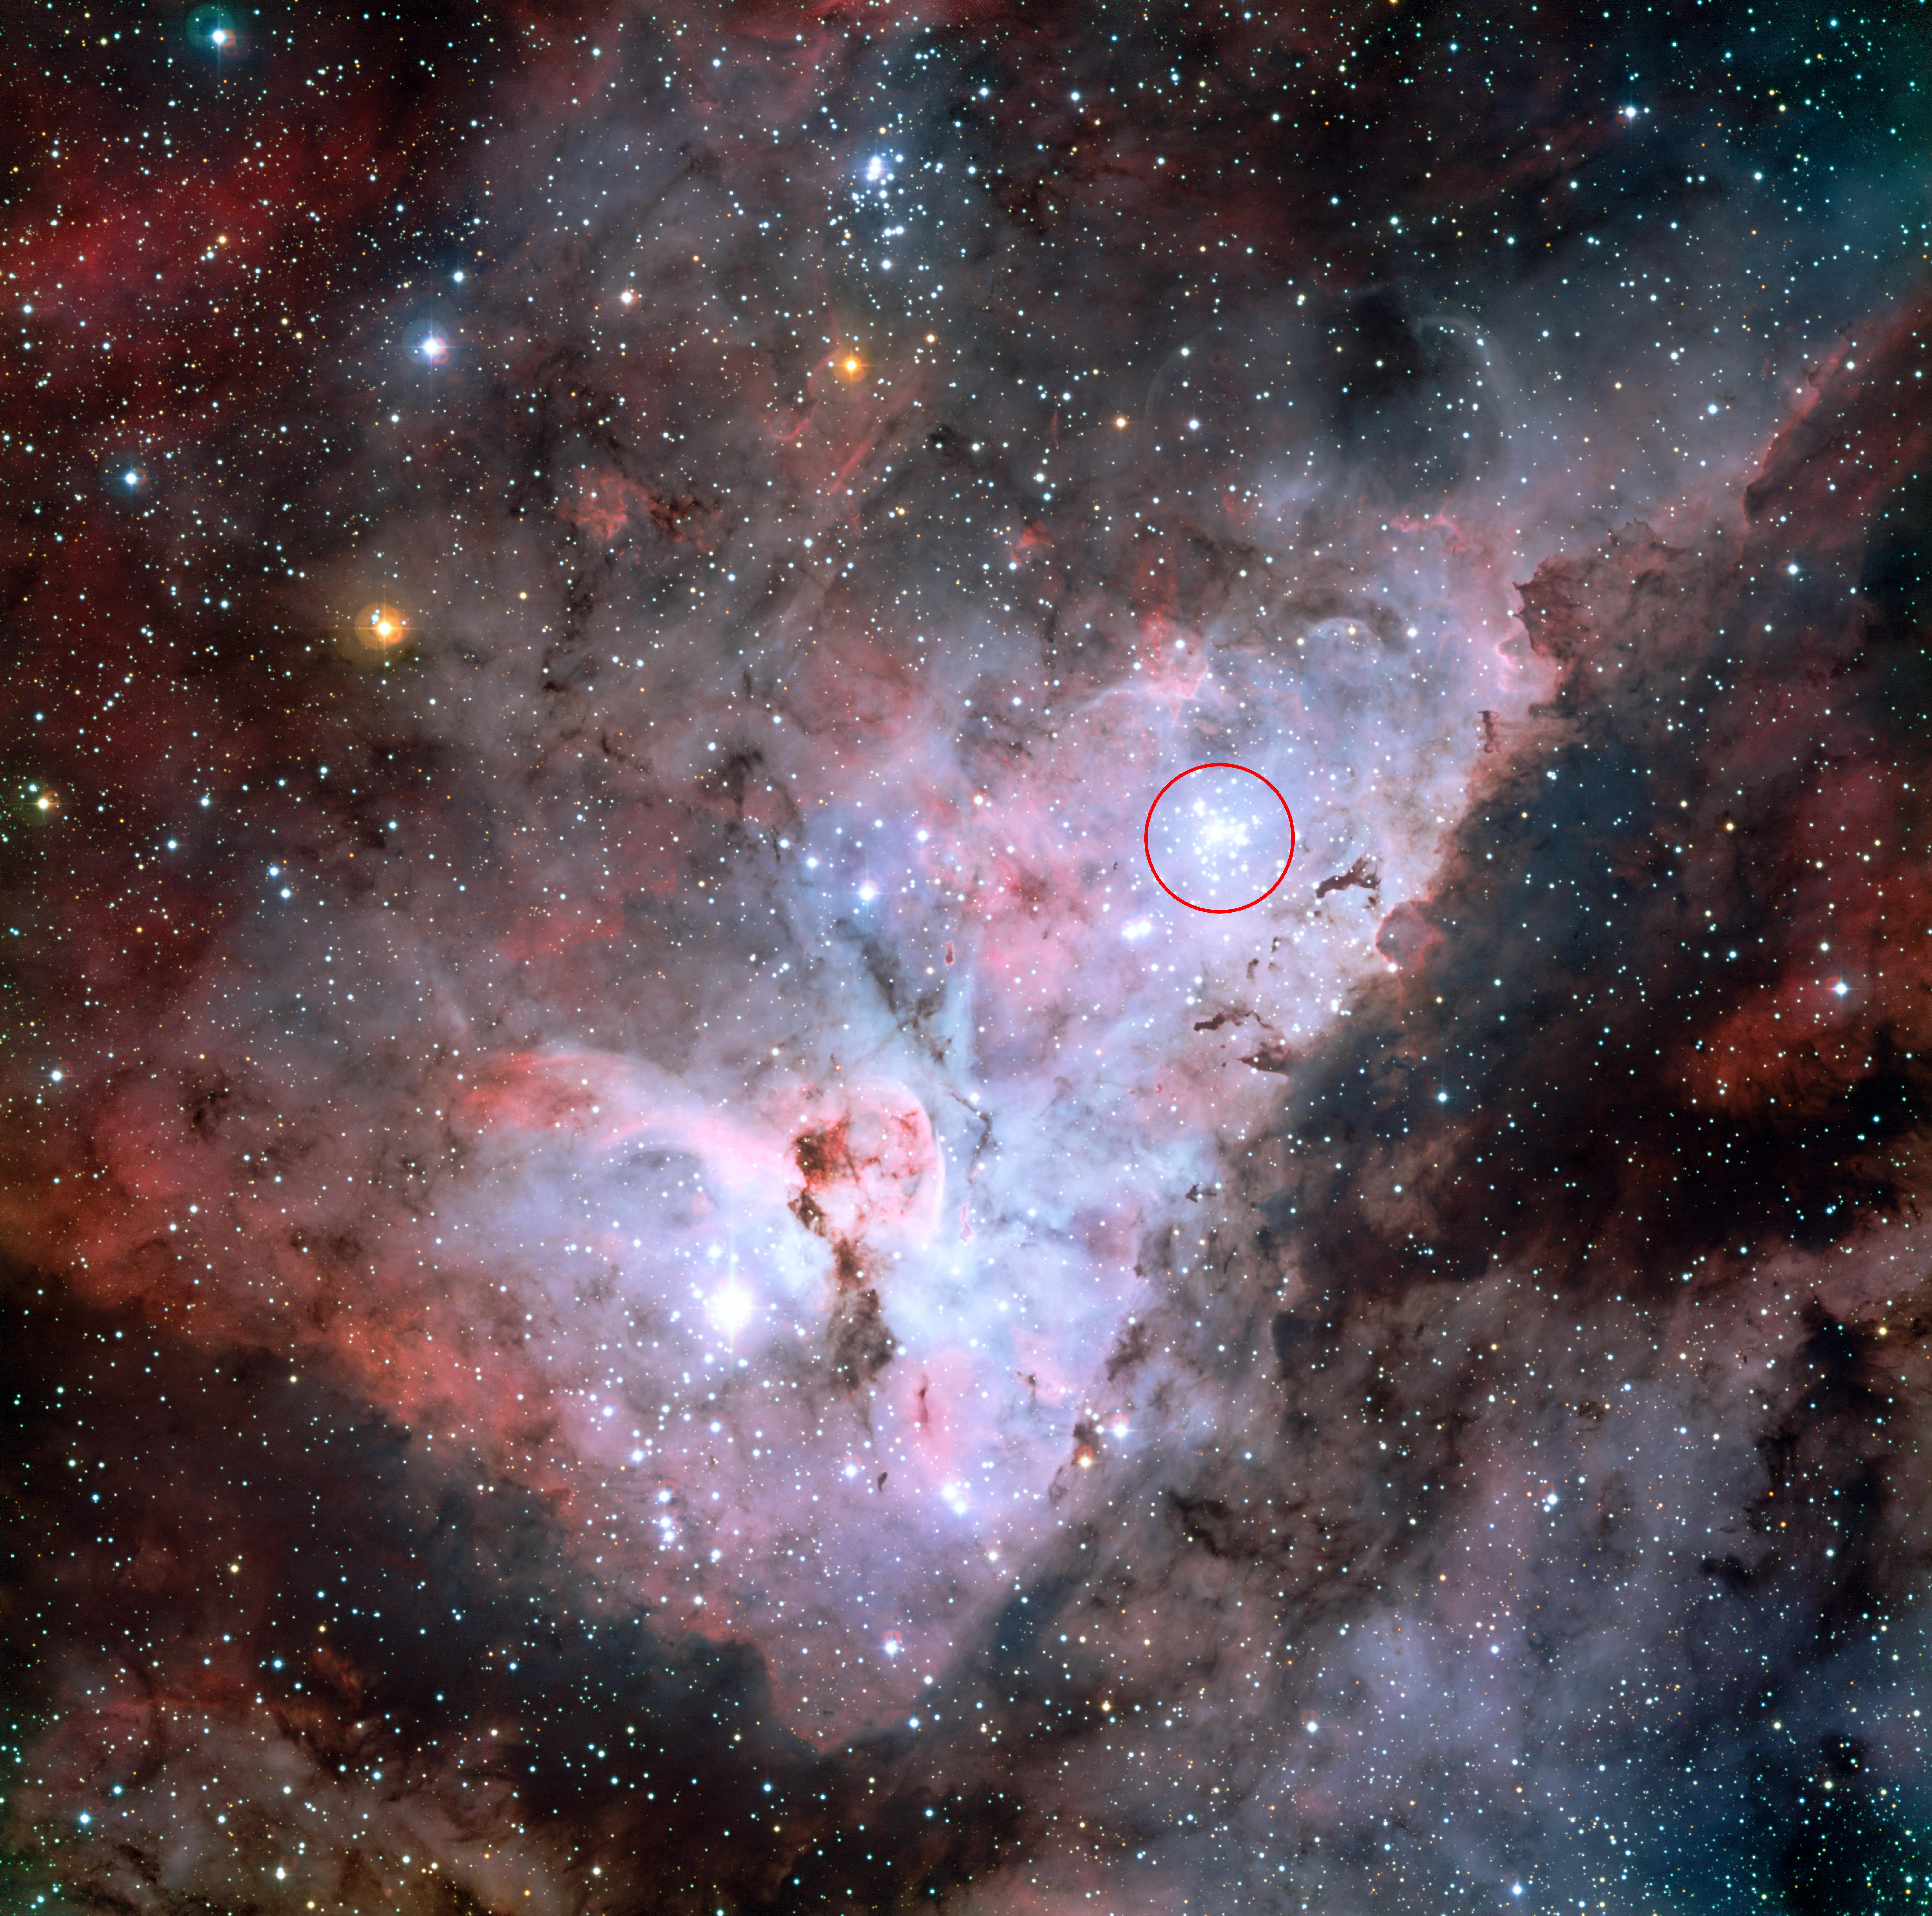

Trumpler 14 embedded in the Carina Nebula

This colour-composite image of the Carina Nebula, made by the MPG/ESO 2.2-metre telescope at La Silla, Chile, reveals exquisite details in the stars and dust of the region. The open star cluster Trumpler 14, a collection of very bright, young stars within the Carina Nebula, is marked with a red circle.

Several more well known astronomical objects can be seen in this wide field image: to the bottom left of the image is one of the most impressive binary stars in the Universe, Eta Carinae, with the famous Keyhole Nebula just adjacent to the star. A second open star cluster, Collinder 228 is also seen in the image, just below Eta Carinae.

Credit: ESO